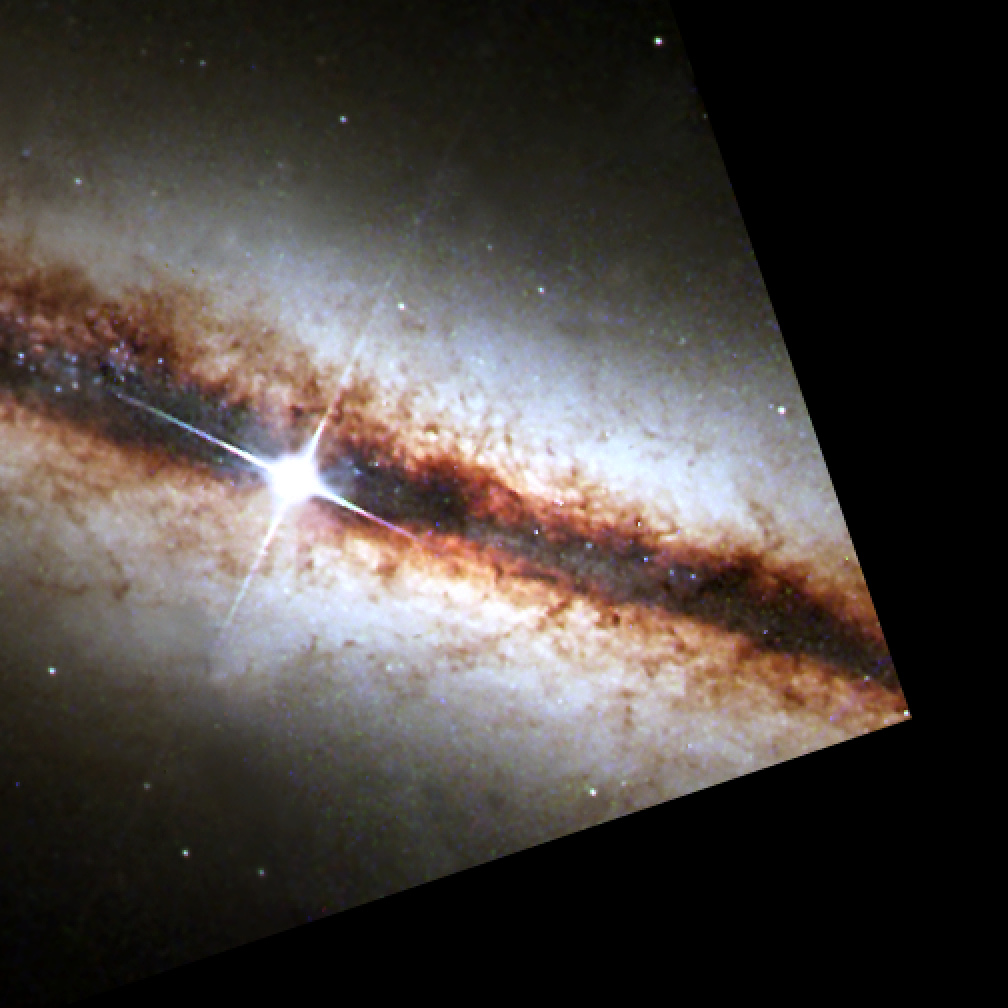

NICMOS finds a golden ring at the heart of a galaxy (WFPC2 image)

In this visible-light view of the galaxy NGC 4013, the star-forming ring (which is visible in a NICMOS image of the same region) cannot be seen because it is embedded in dust. The most prominent feature in this visible-light image - taken by the Wide Field and Planetary Camera 2(WFPC2) - is the thin, dark band of gas and dust, which is about 500 light-years thick.

NGC 4013, which looks similar to our Milky Way Galaxy, resides in the constellation Ursa Major, 55 million light-years from Earth.

Credit: NASA, the Hubble Heritage Team (STScI/AURA) and ESA